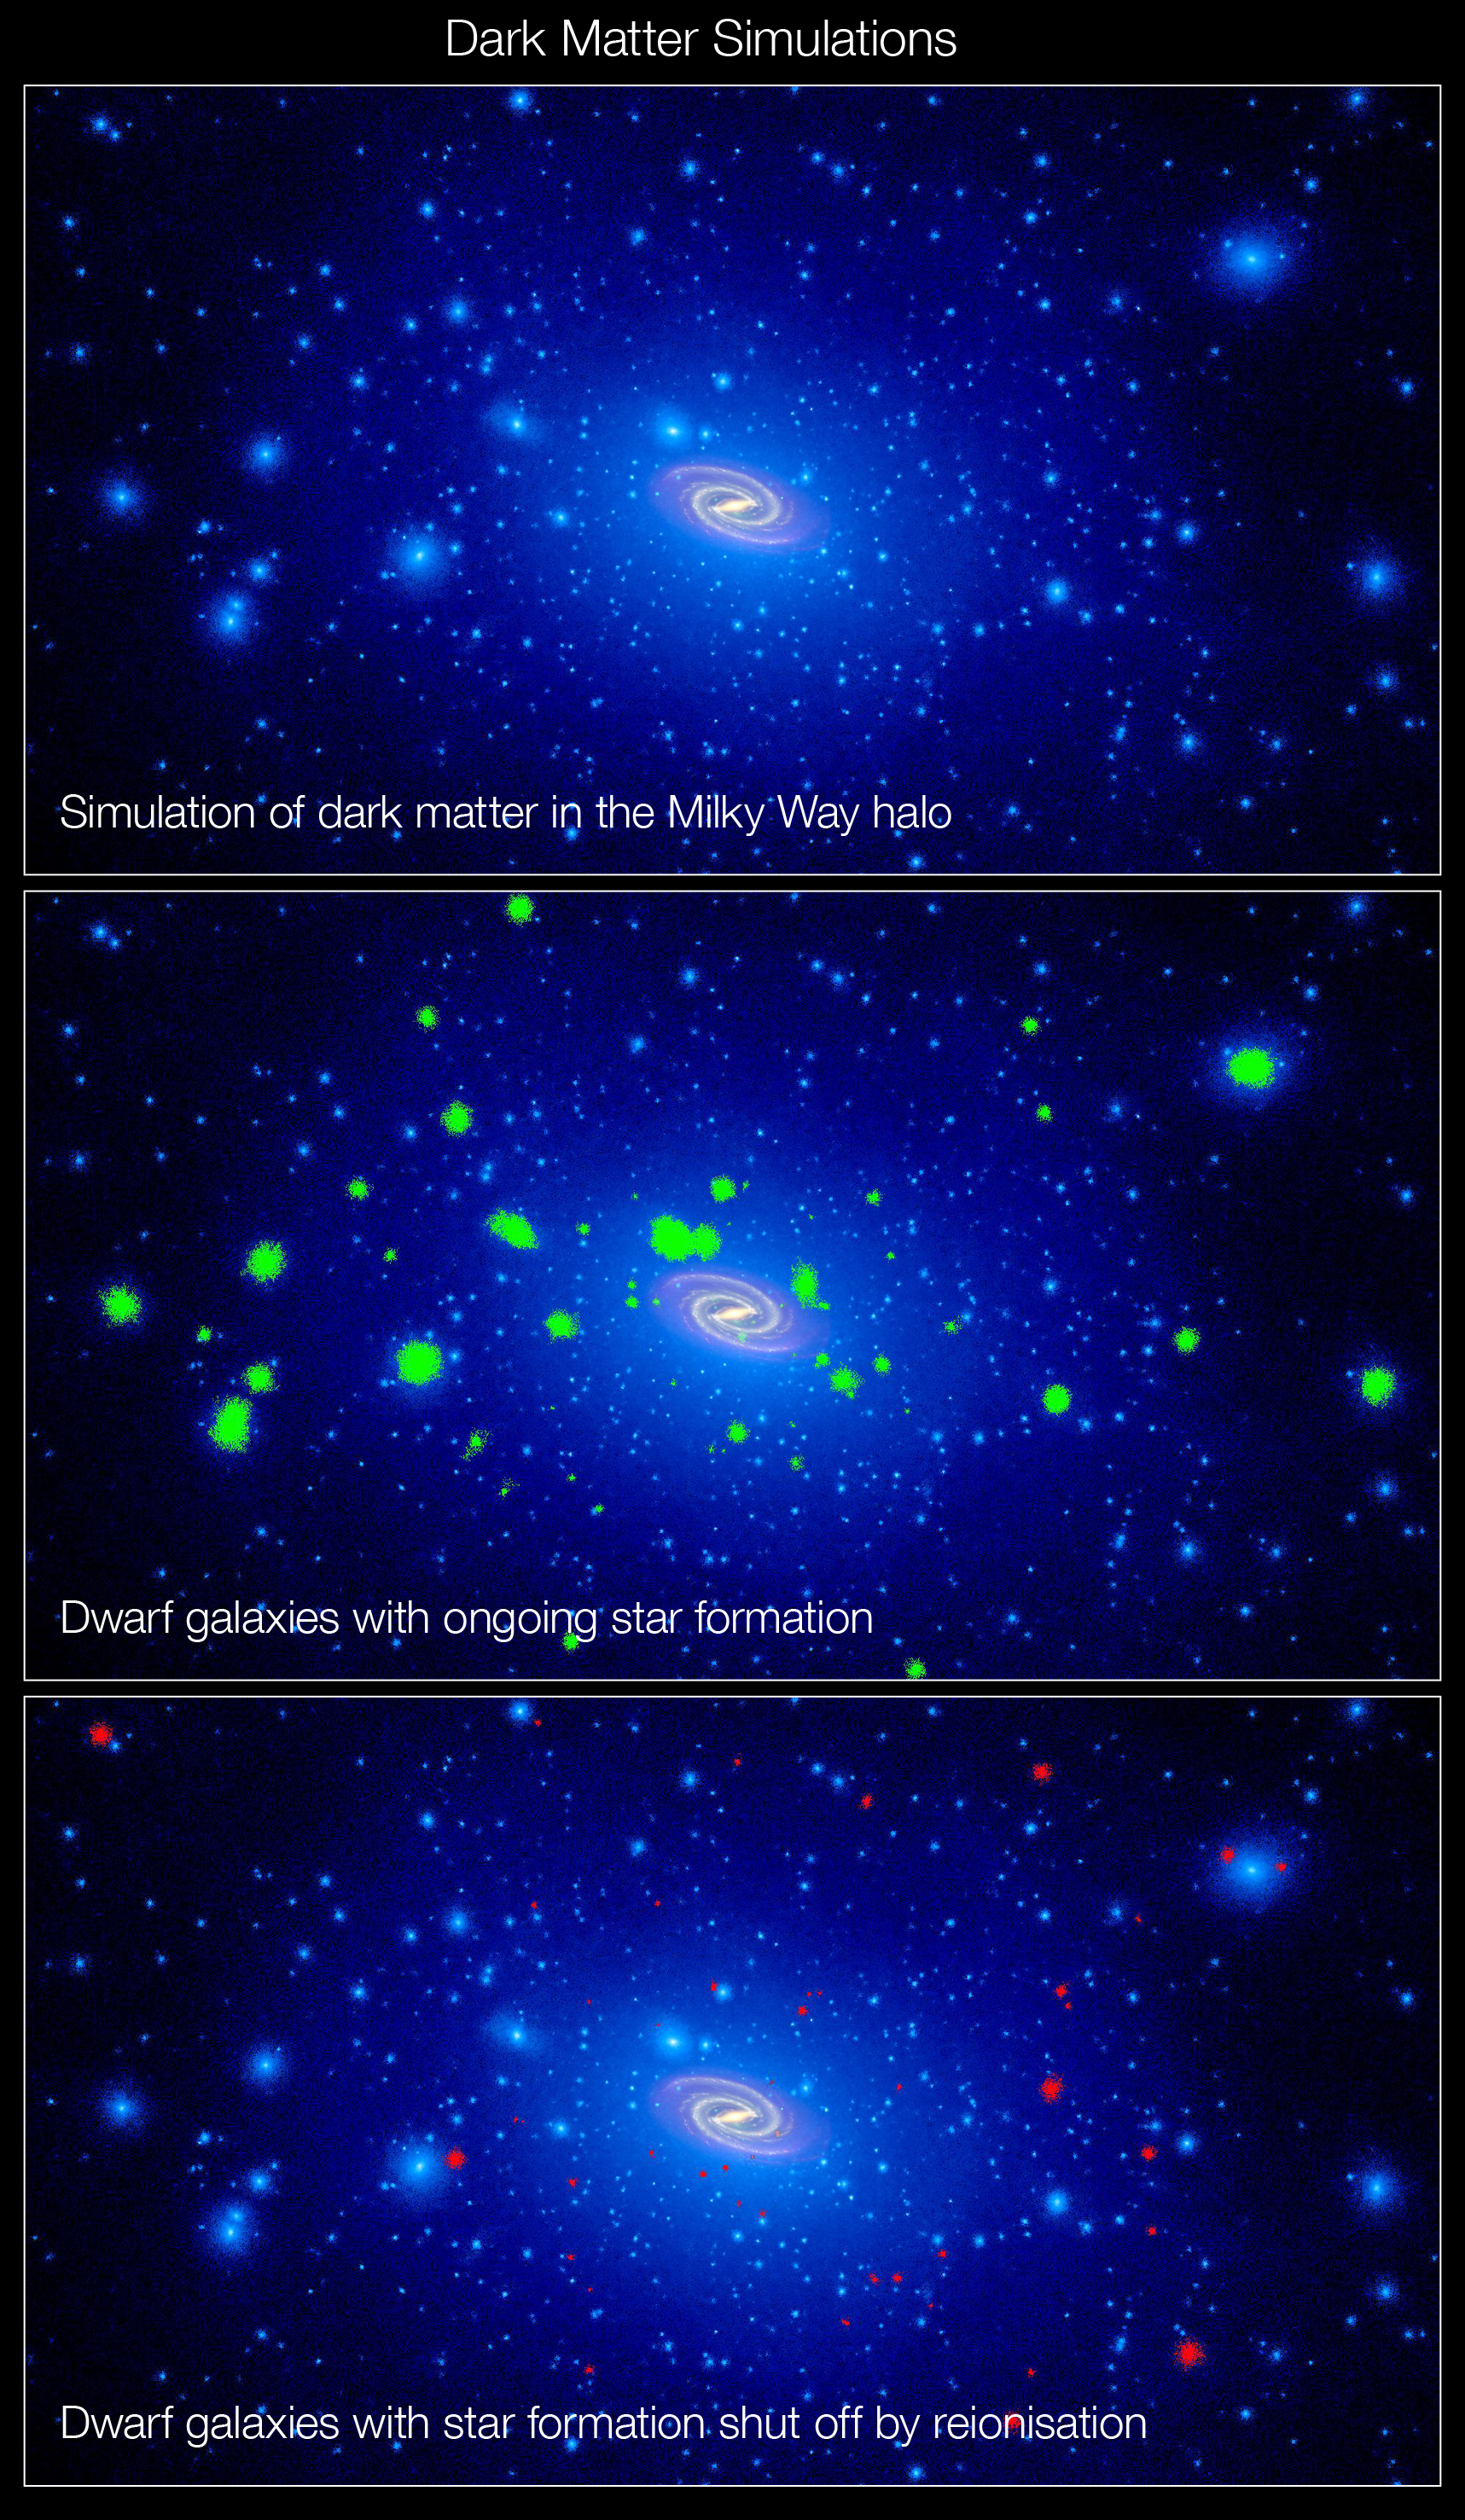

A swarm of dark matter around the Milky Way

These illustrations, taken from computer simulations, show a swarm of dark matter clumps around our Milky Way galaxy. Some of the dark-matter concentrations are massive enough to spark star formation. Dark matter is an invisible substance that accounts for most of the universe’s mass.

In the first panel, thousands of clumps of dark matter coexist with our Milky Way galaxy, shown in the center.

The green blobs in the second panel are those dark-matter chunks massive enough to obtain gas from the intergalactic medium and trigger ongoing star formation, eventually creating dwarf galaxies.

In the third panel, the red blobs are ultra-faint dwarf galaxies that stopped forming stars long ago. New Hubble Space Telescope observations of three of the puny galaxies reveal that star-making in these faint galaxies shut down more than 13 billion years ago.

The synchronised shutdown is evidence that a global event, such as reionisation, swept through the early universe. Reionisation is a transitional phase in the early universe when the first stars burned off a fog of cold hydrogen.

Popular theory predicts that most of the Milky Way’s satellites contain few, if any, stars and are instead dominated by dark matter. More than a dozen small-fry galaxies have been found so far, all by the Sloan Digital Sky Survey, which scanned just a quarter of the sky.

Credit: J. Tumlinson (STScI)